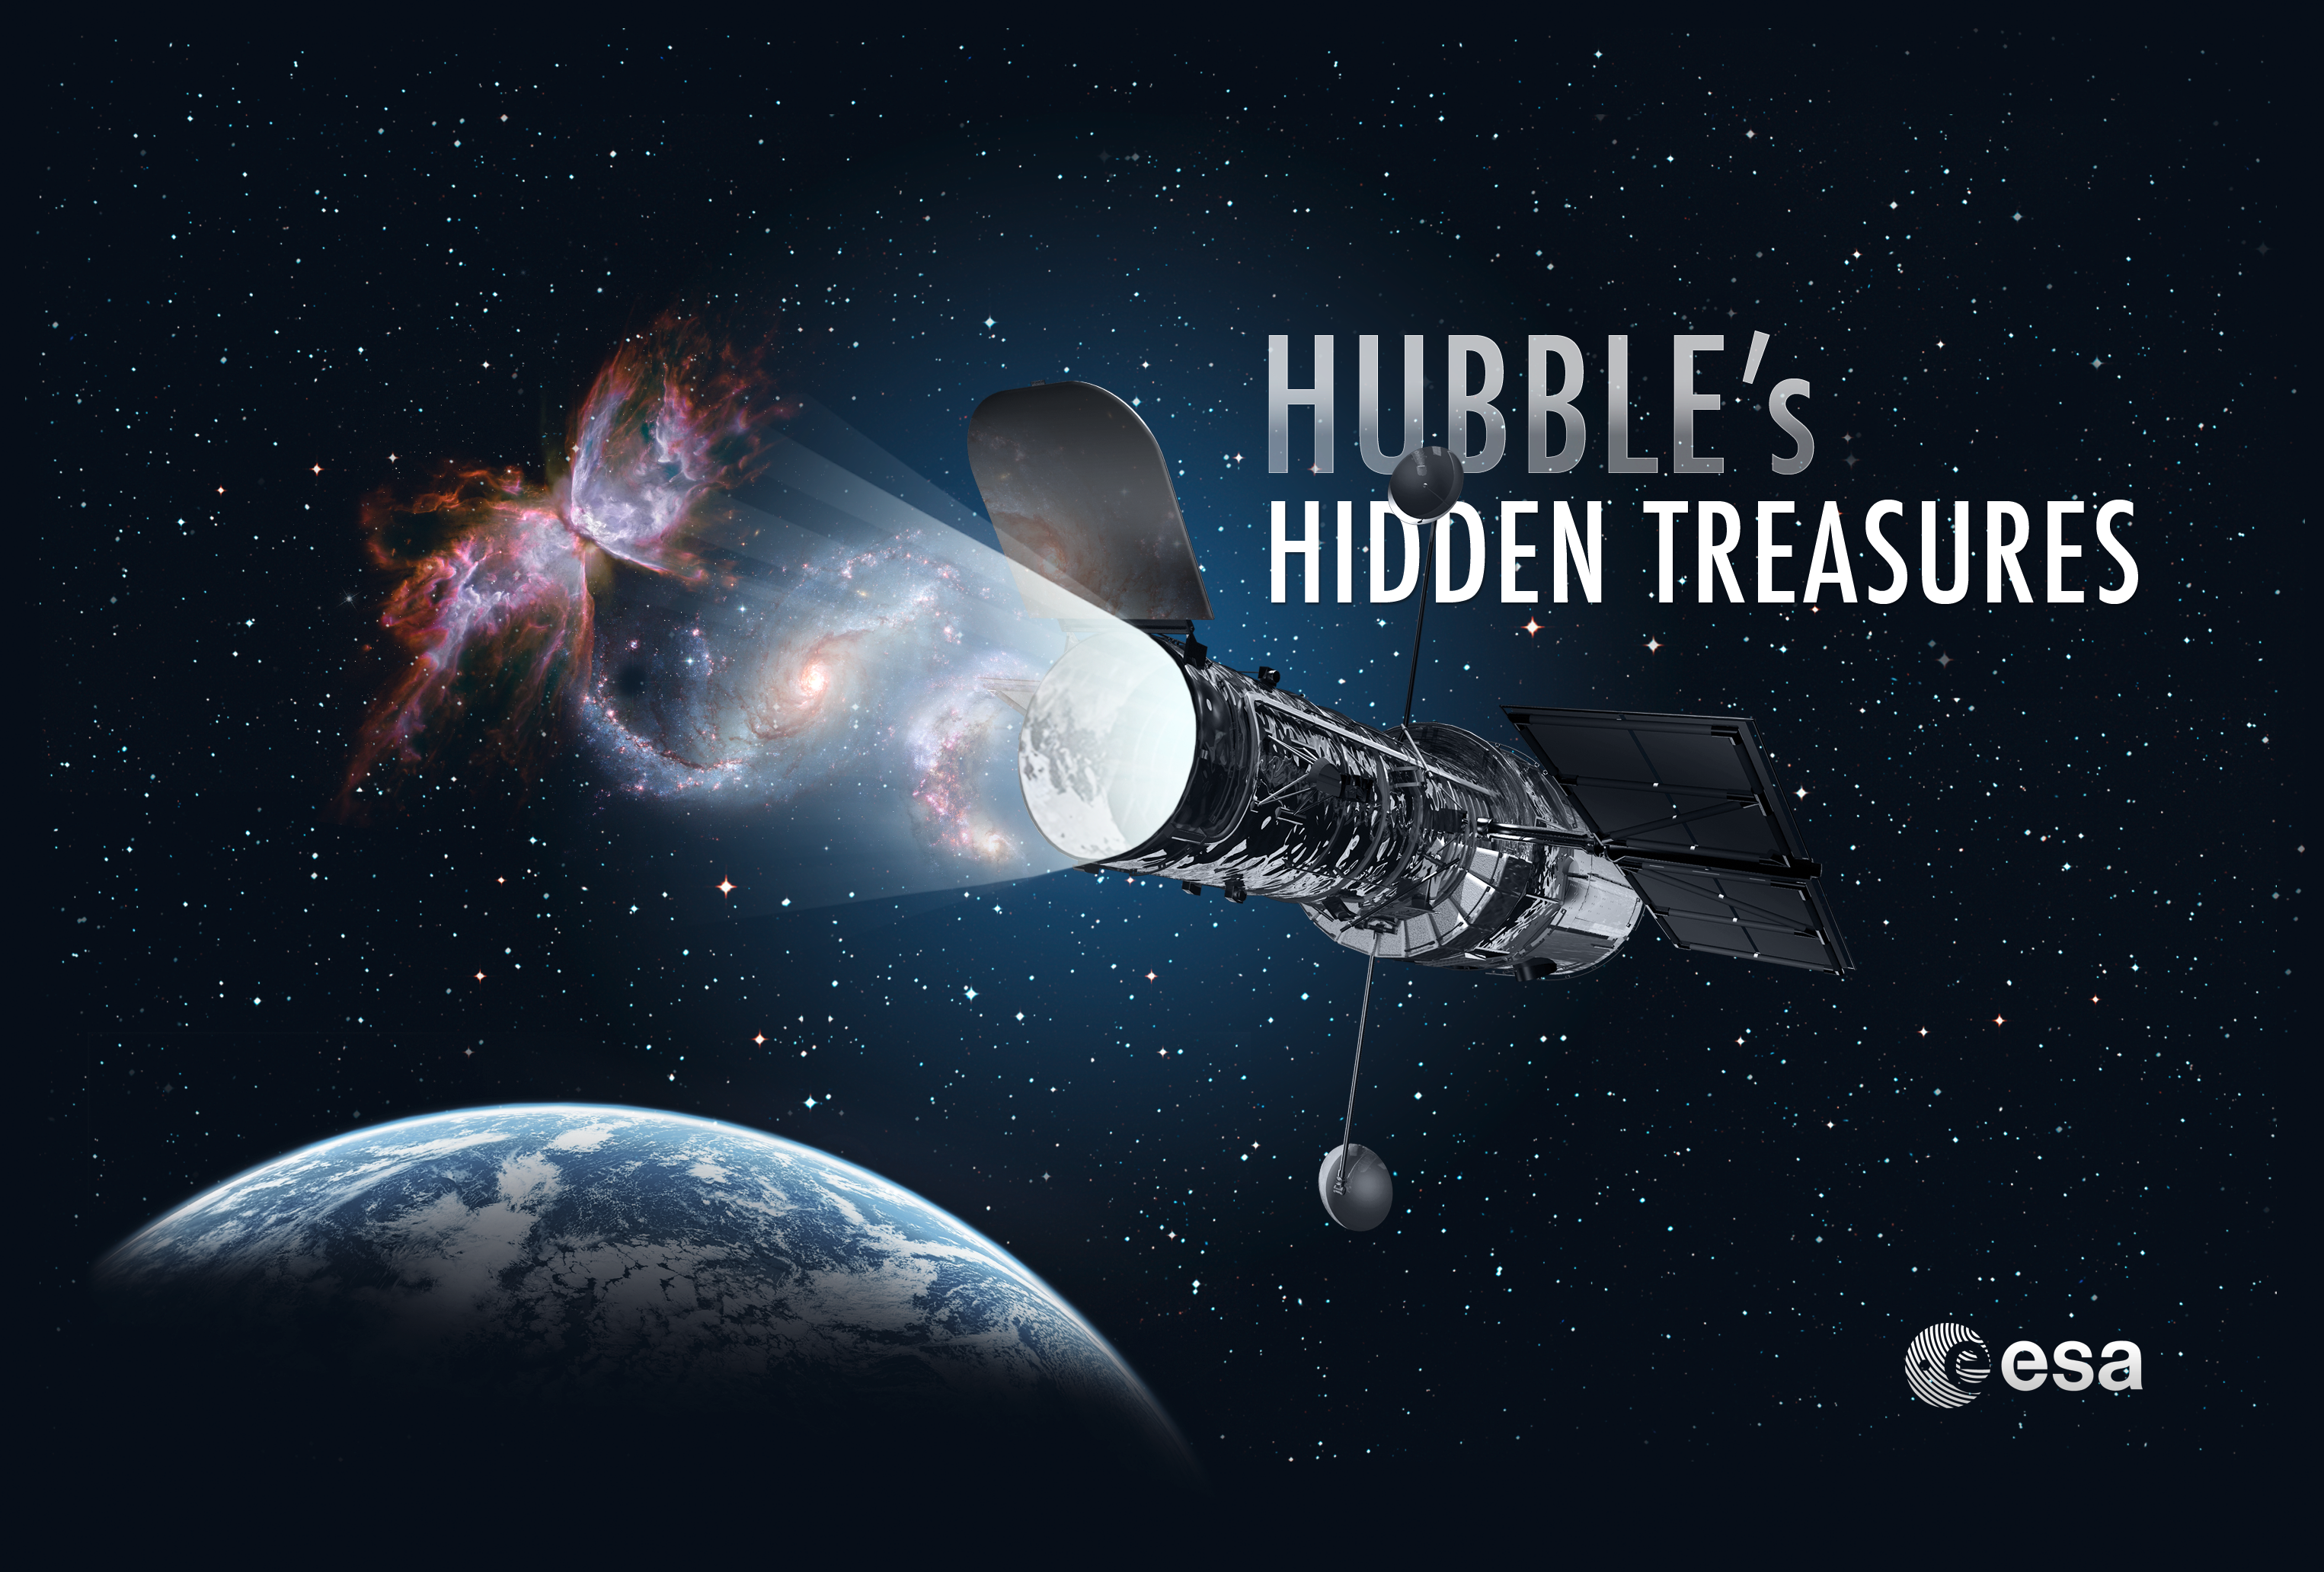

Hubblecast 53: Hidden Treasures in Hubble's archive

In Hubblecast 53, Dr J (aka Dr Joe Liske) explores the depths of Hubble's enormous science archive.

Credit: NASA & ESA